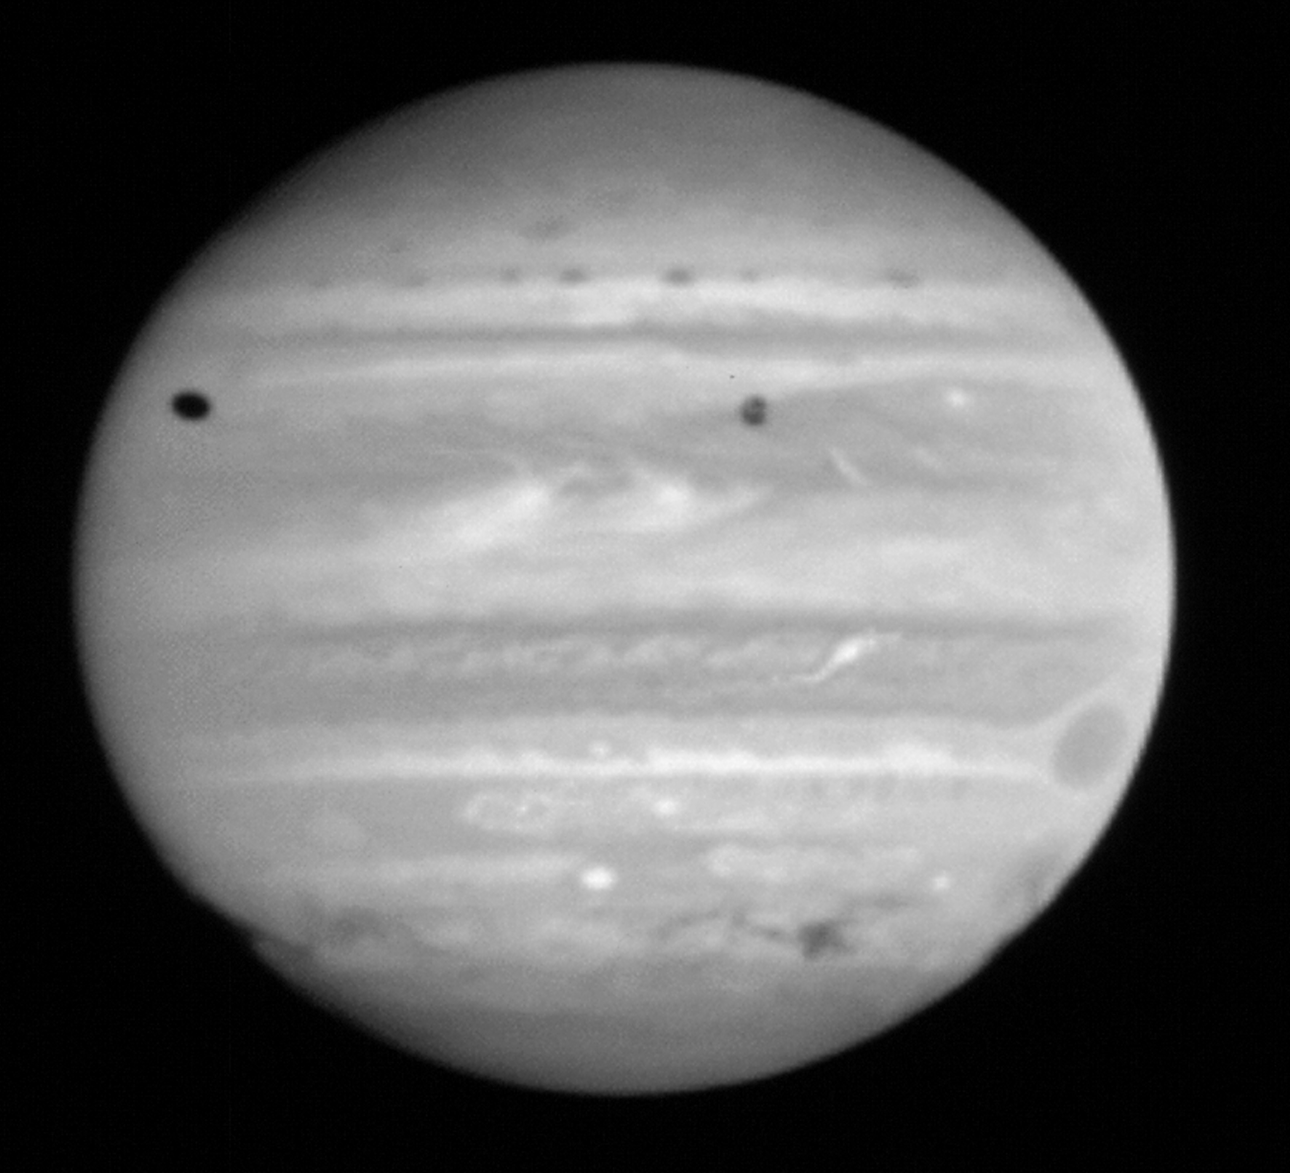

Jupiter Comet Impact

This image of Jupiter shows the remarkable spreading of the clouds of smoke and dust thrown into the atmosphere after the impacts of the fragments of comet P/Shoemaker-Levy 9. These dark regions provide the only information ever obtained on the wind direction and speed in Jupiter's upper atmosphere.

Credit: NASA & ESA